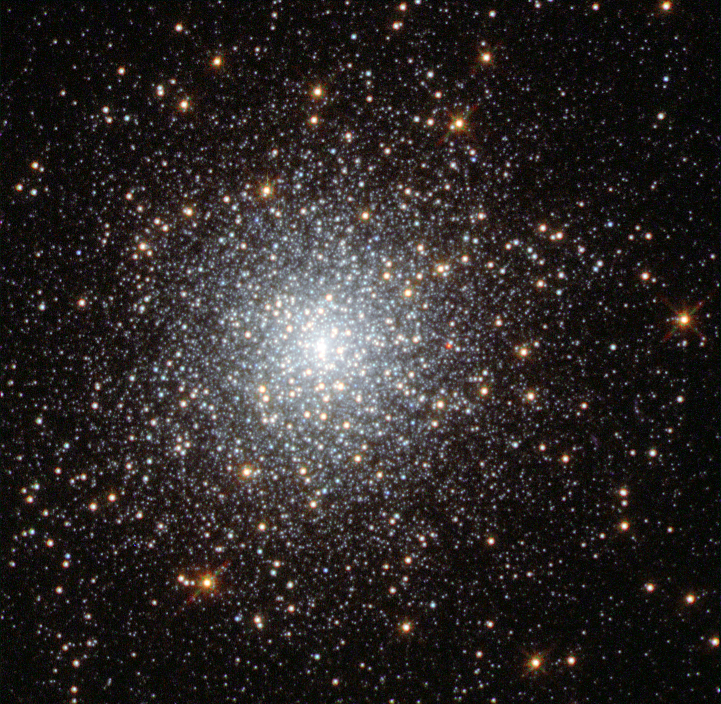

Globular cluster Fornax 3

This NASA/ESA Hubble Space Telescope image shows the globular cluster Fornax 3 in the dwarf galaxy Fornax.

New observations of this cluster and three others in the galaxy show that they are very similar to those found in our galaxy, the Milky Way. The finding is at odds with leading theories on how these clusters form — in these theories, globular clusters should be nestled among large quantities of old stars — and so the mystery of how these objects came to exist deepens.

This cluster’s position within the galaxy is shown in image G.

Credit: NASA, ESA, S. Larsen (Radboud University, the Netherlands)